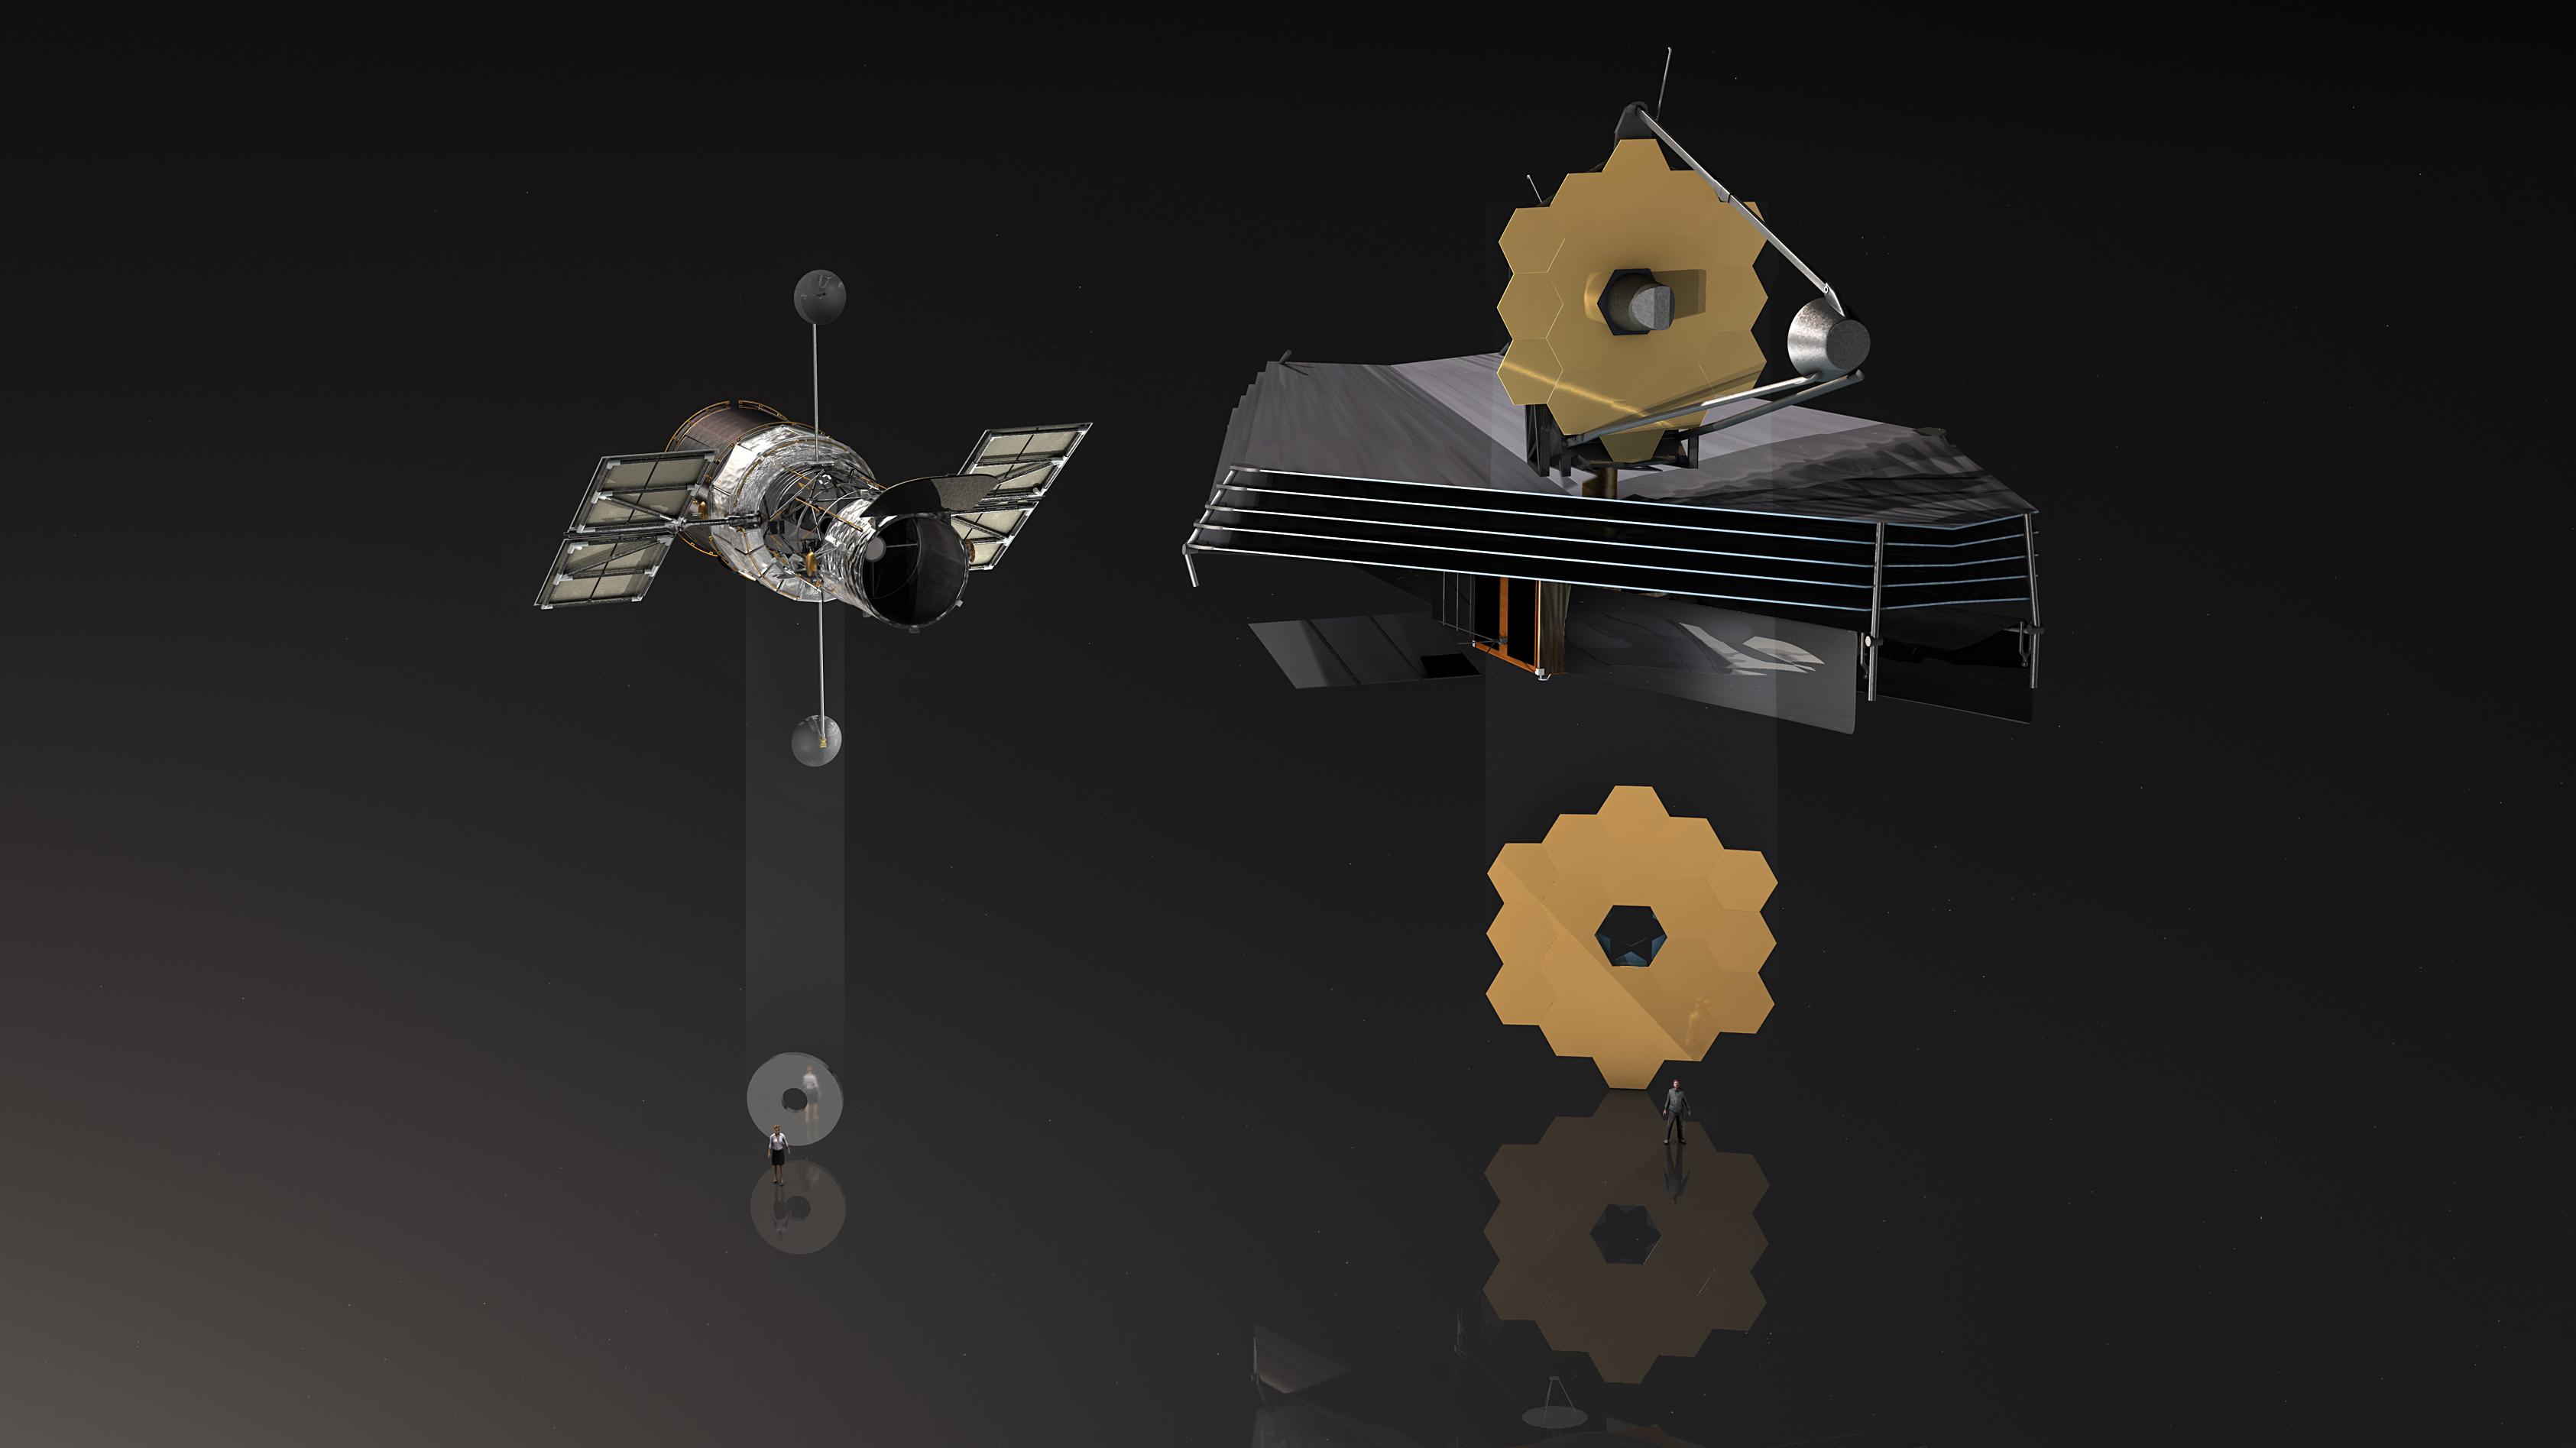

Comparison of Hubble and James Webb mirror

This illustration shows both the NASA/ESA Hubble Space Telescope and the NASA/ESA/CSA James Webb Space Telescope and compares their respective mirrors. The main mirror of Hubble has a diameter of 2.4 metres, the foldable main mirror of James Webb is even 6.5 metres in diameter.

Credit: ESA/M. Kornmesser